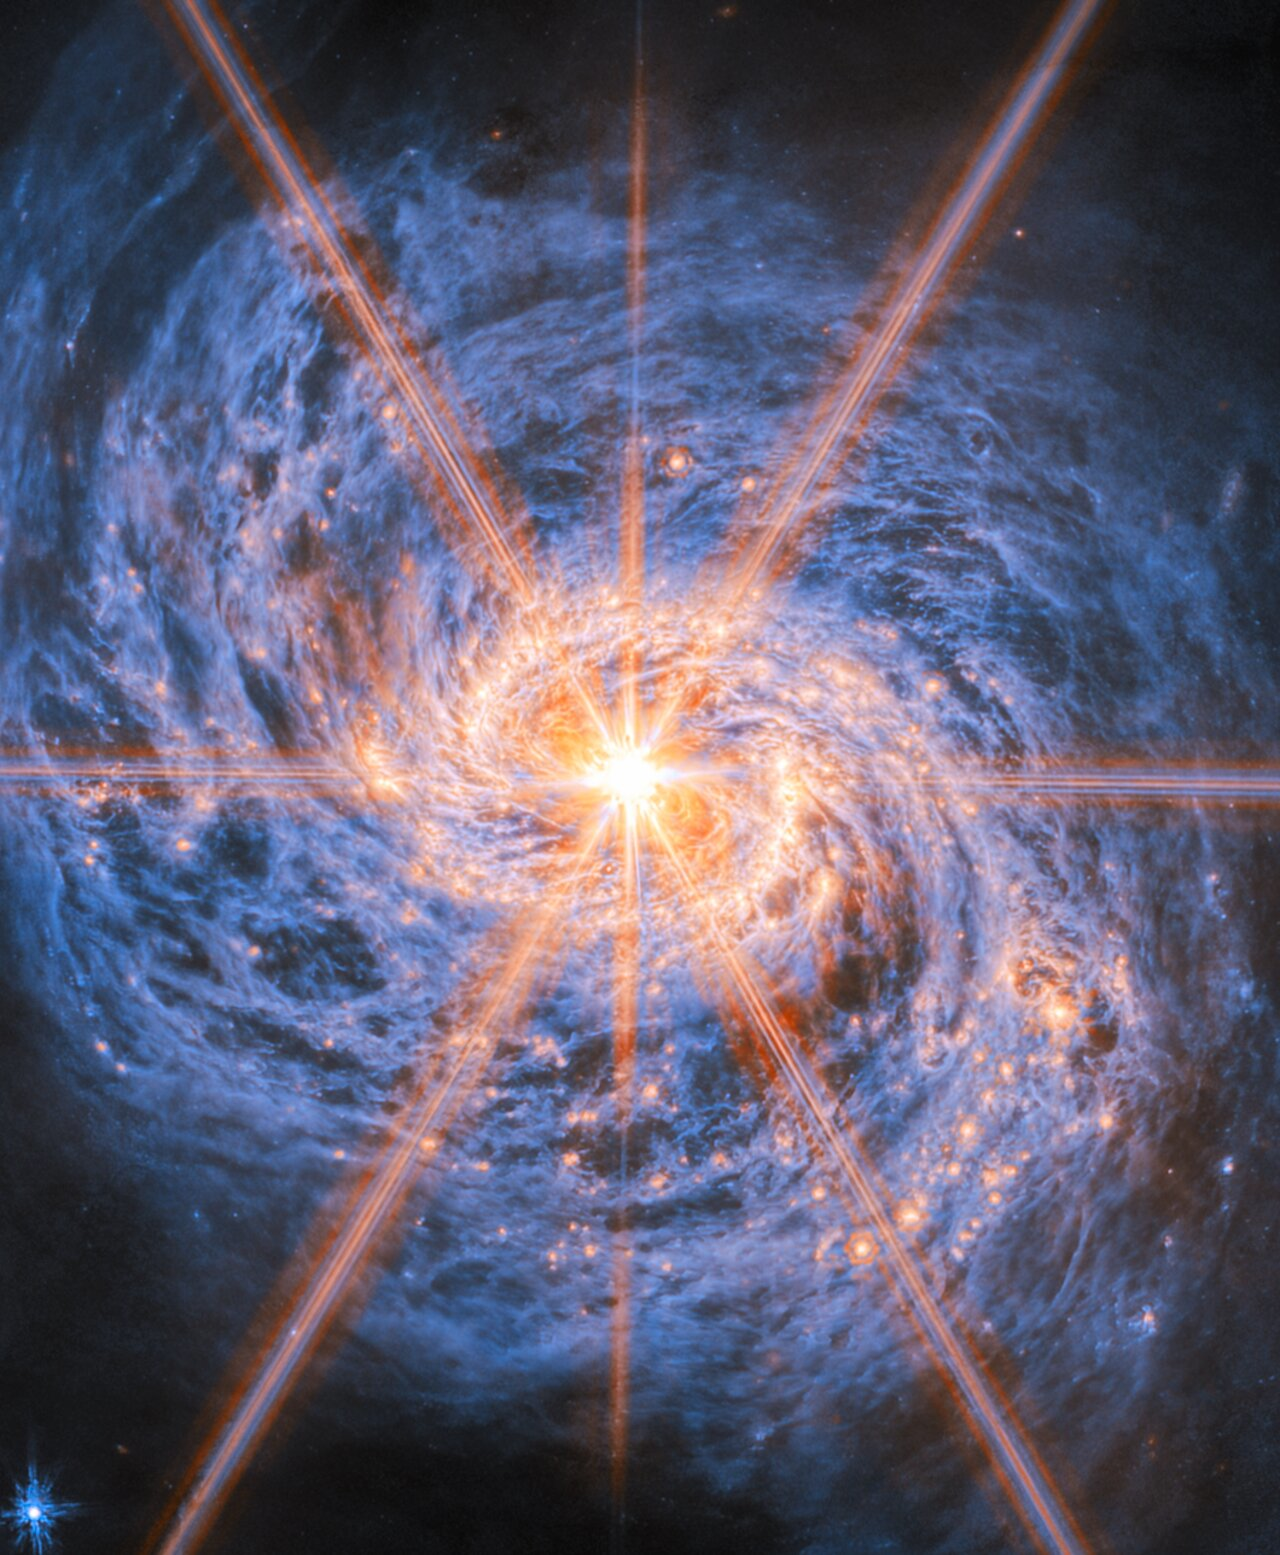

A beacon of light in swirls of dust

This latest Picture of the Month from the NASA/ESA/CSA James Webb Space Telescope features Messier 77 (M77), a barred spiral galaxy famous and appreciated among astronomers for its combination of relative proximity and spectacular features to study. It is located 45 million light-years away in the constellation Cetus (The Whale). This new image from Webb’s Mid-Infrared Instrument (MIRI) highlights its swirling spiral arms, the dust in its disc and its piercingly bright core like never before.

At the heart of M77 is a compact region filled with hot gas that handily outshines the rest of the galaxy put together, even overcoming the light-gathering capacity of Webb’s cameras. This is an active galactic nucleus (AGN), and it’s powered by M77’s central supermassive black hole, which is eight million times as massive as our Sun. Gas in the galaxy’s central regions is pulled by the strong gravity into a tight and rapid orbit around the black hole, where it crashes together and heats up, releasing tremendous amounts of radiation.

The bright orange lines appearing to radiate out from the centre of M77 are not actually a feature of the galaxy: they are a type of distortion that arises from the optical design of the telescope. Called diffraction spikes, they are created because the intense light from the unresolved AGN is bent (“diffracted”) very slightly at the edges of Webb’s hexagonal mirror panels and around one of the struts that hold up its secondary mirror. This distinctive six-plus-two-pointed pattern is the same for any image taken by Webb. For diffraction spikes to appear, the light source has to be very bright and very concentrated, so they’re most often seen on stars. But in some galaxies, as here, the nucleus is bright and compact enough to make diffraction spikes appear as well.

M77 is not just known for its easily visible AGN, but also as a prolific star-forming galaxy. The near-infrared image of M77 reveals a bar spanning across the central region, which doesn’t appear in visible-light images of the galaxy. The bar is enclosed by a bright ring, called a starburst ring, formed by the inner ends of M77’s two spiral arms. Starburst regions in galaxies are typified by extremely high star-formation rates. This ring is more than 6 000 light-years across and displays intense and widespread starbursts, visible in this image by the densely concentrated orange bubbles all around the ring. Since M77 is relatively close to Earth, this starburst ring is a very well-studied example of the phenomenon.

As an active spiral galaxy, M77’s disc is filled with gas and dust which is both a product of and fuel for future star formation. Webb’s MIRI fills out our view of the galaxy with the glow of interstellar dust grains emitted at longer wavelengths, shown here in blue. The dust forms a huge vortex of smoky, swirling filaments with cavities in between. The glowing orange bubbles carved out by newly formed star clusters are also prominently visible out along the galaxy’s arms.

Beyond Webb’s quite focused view, M77’s arms join into a faint extended ring of hydrogen gas thousands of light-years wide, where yet more star formation is taking place. Vast, tenuous filaments of hydrogen gas stretch across this ring and out into intergalactic space, forming an outermost layer around the galaxy. For the tentacle-like appearance of these filaments, M77 is also named the Squid Galaxy.

The data used to create this image are from an observing programme (#3707) that surveyed massive, nearby, star-forming galaxies to create a rich dataset useful for many scientific investigations. As can be seen here, the stunning resolution of Webb’s instruments reveals star clusters and rich reservoirs of gas, which can be used to explore the cycle of star formation, life and death in these and other galaxies.

Credit: ESA/Webb, NASA & CSA, A. Leroy